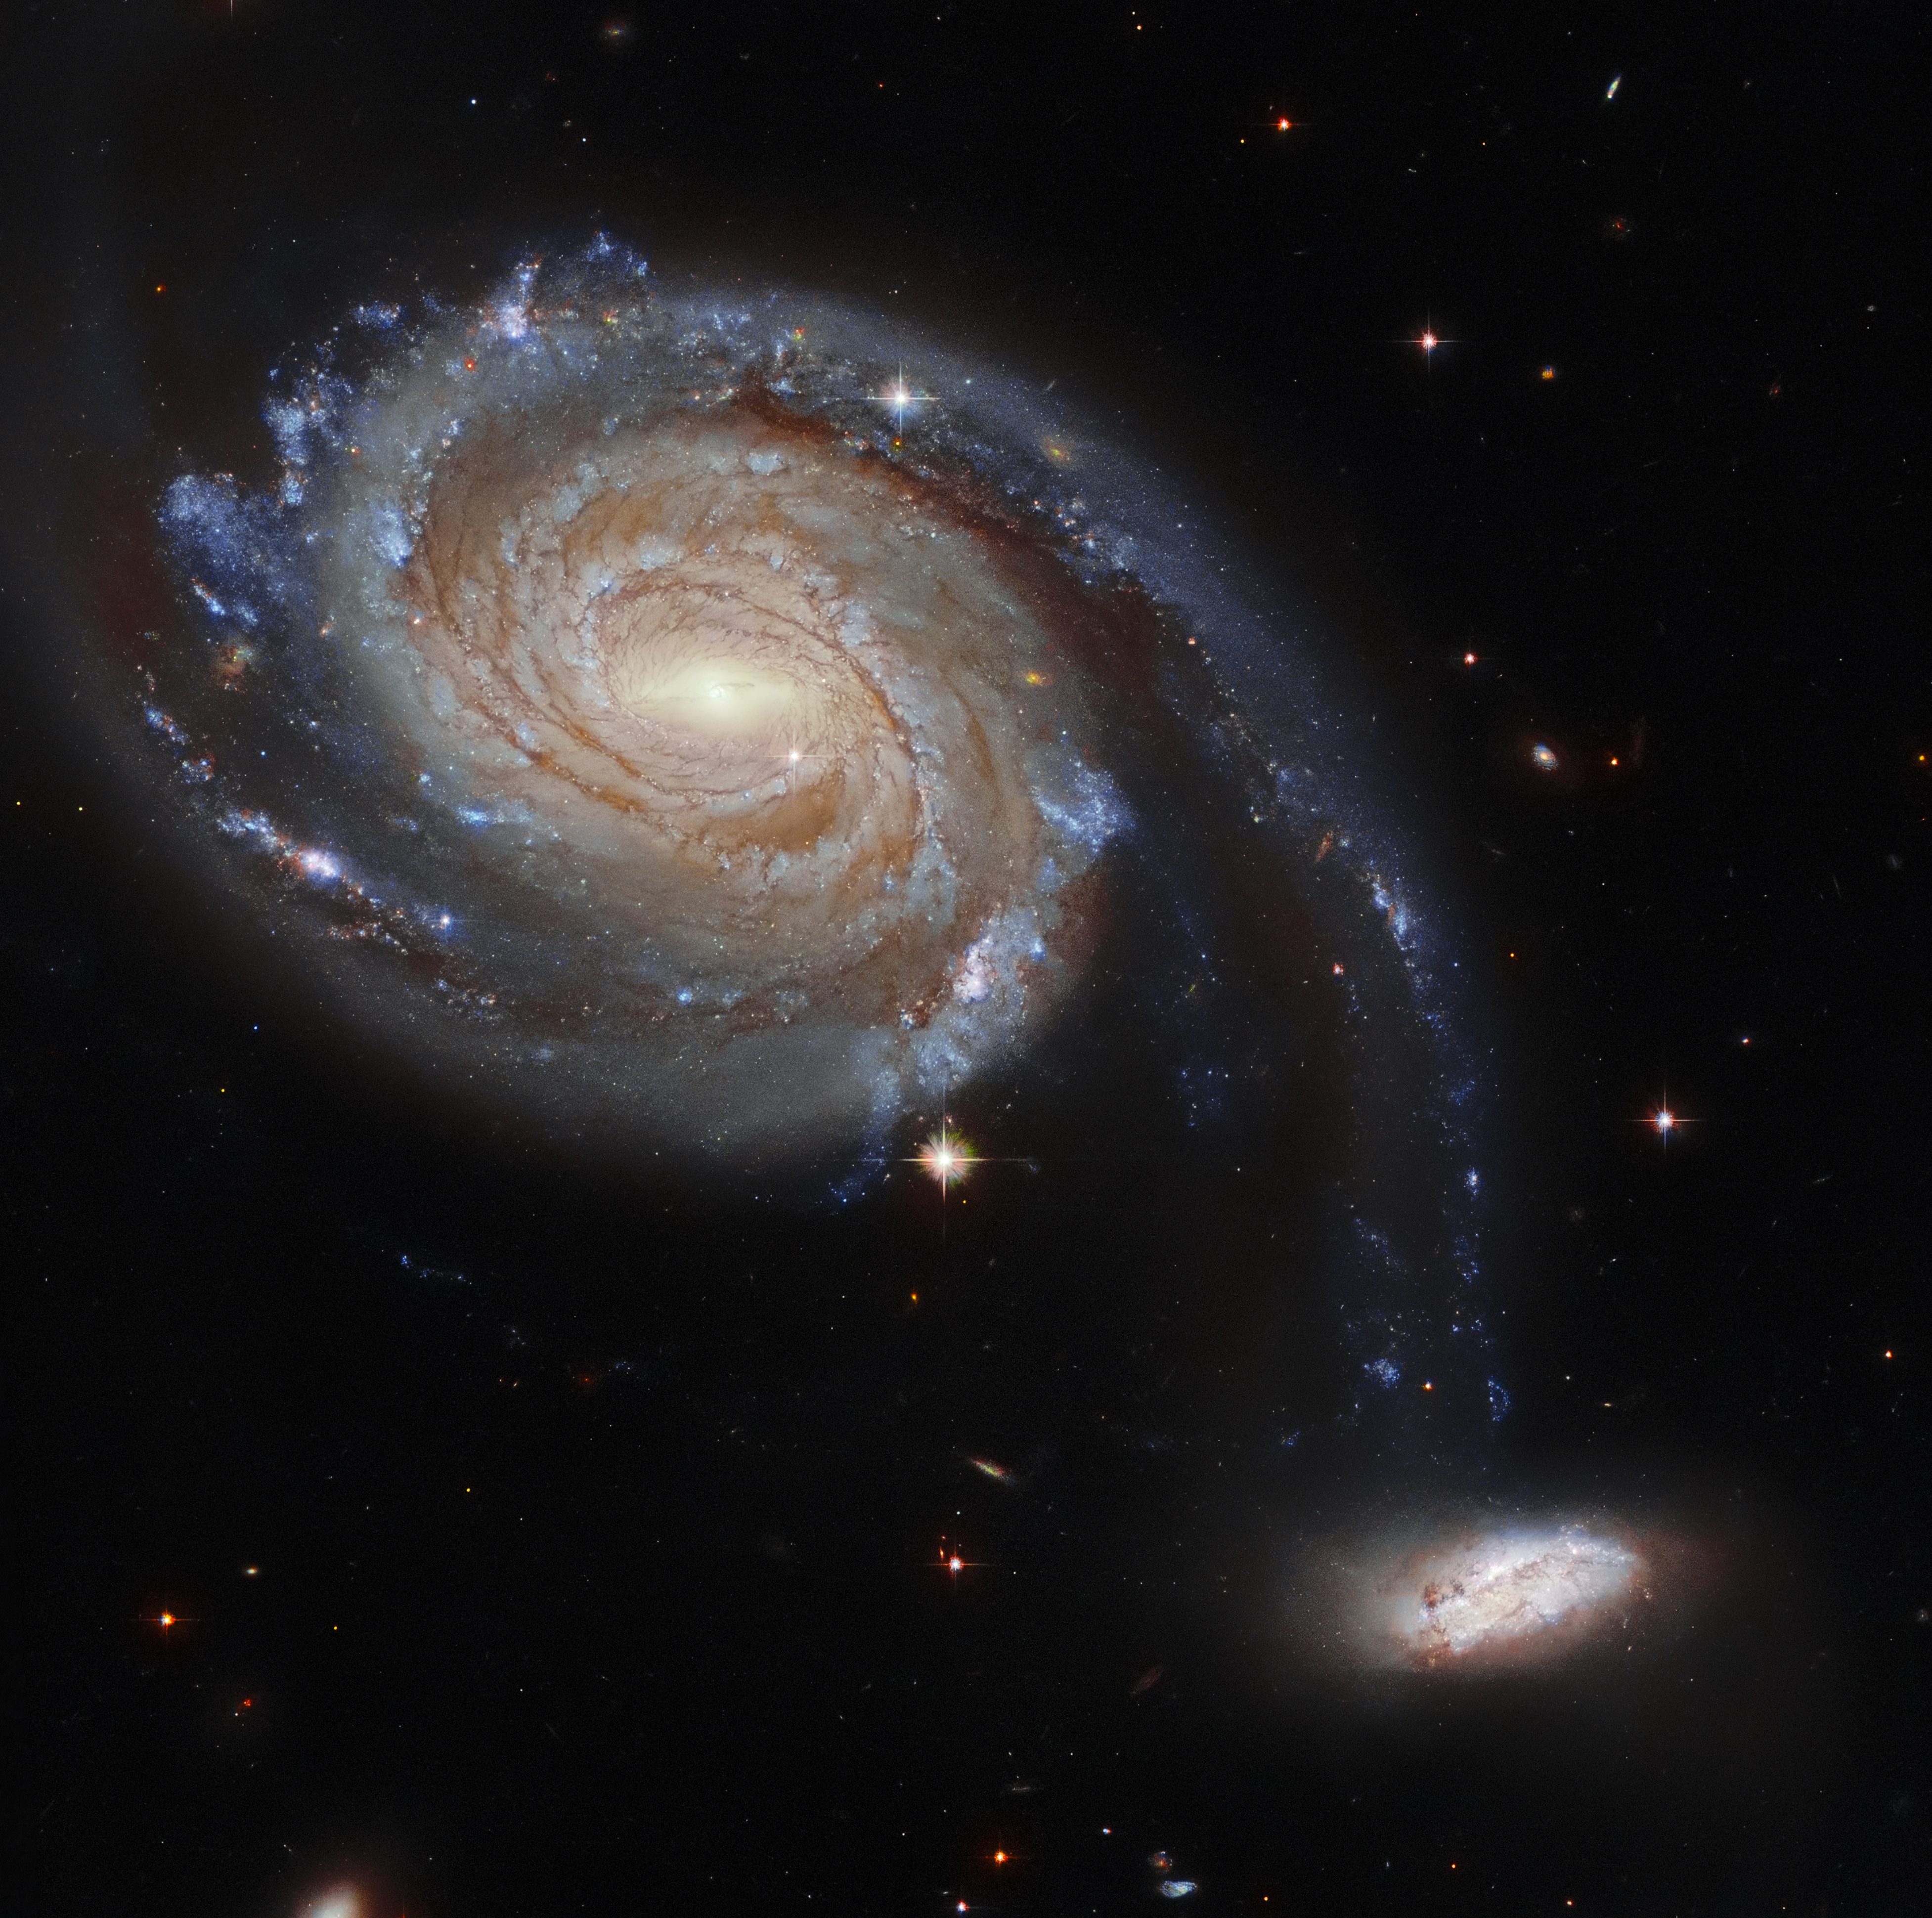

Hubble Spies a Pair of Squabbling Galaxies

This observation from the NASA/ESA Hubble Space Telescope showcases Arp 86, a peculiar pair of interacting galaxies which lies roughly 220 million light-years from Earth in the constellation Pegasus. Arp 86 is composed of the two galaxies NGC 7752 and NGC 7753 — NGC 7753 is the large spiral galaxy dominating this image, and NGC 7752 is its smaller companion. The diminutive companion galaxy almost appears to be attached to NGC 7753, and it is this peculiarity that has earned the designation “Arp 86” — signifying that the galaxy pair appears in the Atlas of Peculiar Galaxies compiled by the astronomer Halton Arp in 1966. The gravitational squabble between the two galaxies is doomed to end catastrophically for NGC 7752. It will eventually either be flung out into intergalactic space or be entirely engulfed by its far larger neighbour.

Hubble observed Arp 86 as part of a larger effort to understand the connections between young stars and the clouds of cold gas in which they form. Hubble gazed into star clusters and clouds of gas and dust in a variety of environments dotted throughout nearby galaxies. Combined with measurements from ALMA, a gigantic radio telescope perched high in the Chilean Andes, these Hubble observations provide a treasure trove of data for astronomers working to understand how stars are born.

These observations also helped sow the seeds of future research with an upcoming space telescope, the NASA/ESA James Webb Space Telescope (JWST). This telescope, due to launch later this year, will study star formation in dusty regions such as the galaxies of Arp 86.

Credit: ESA/Hubble and NASA, Dark Energy Survey, J. Dalcanton